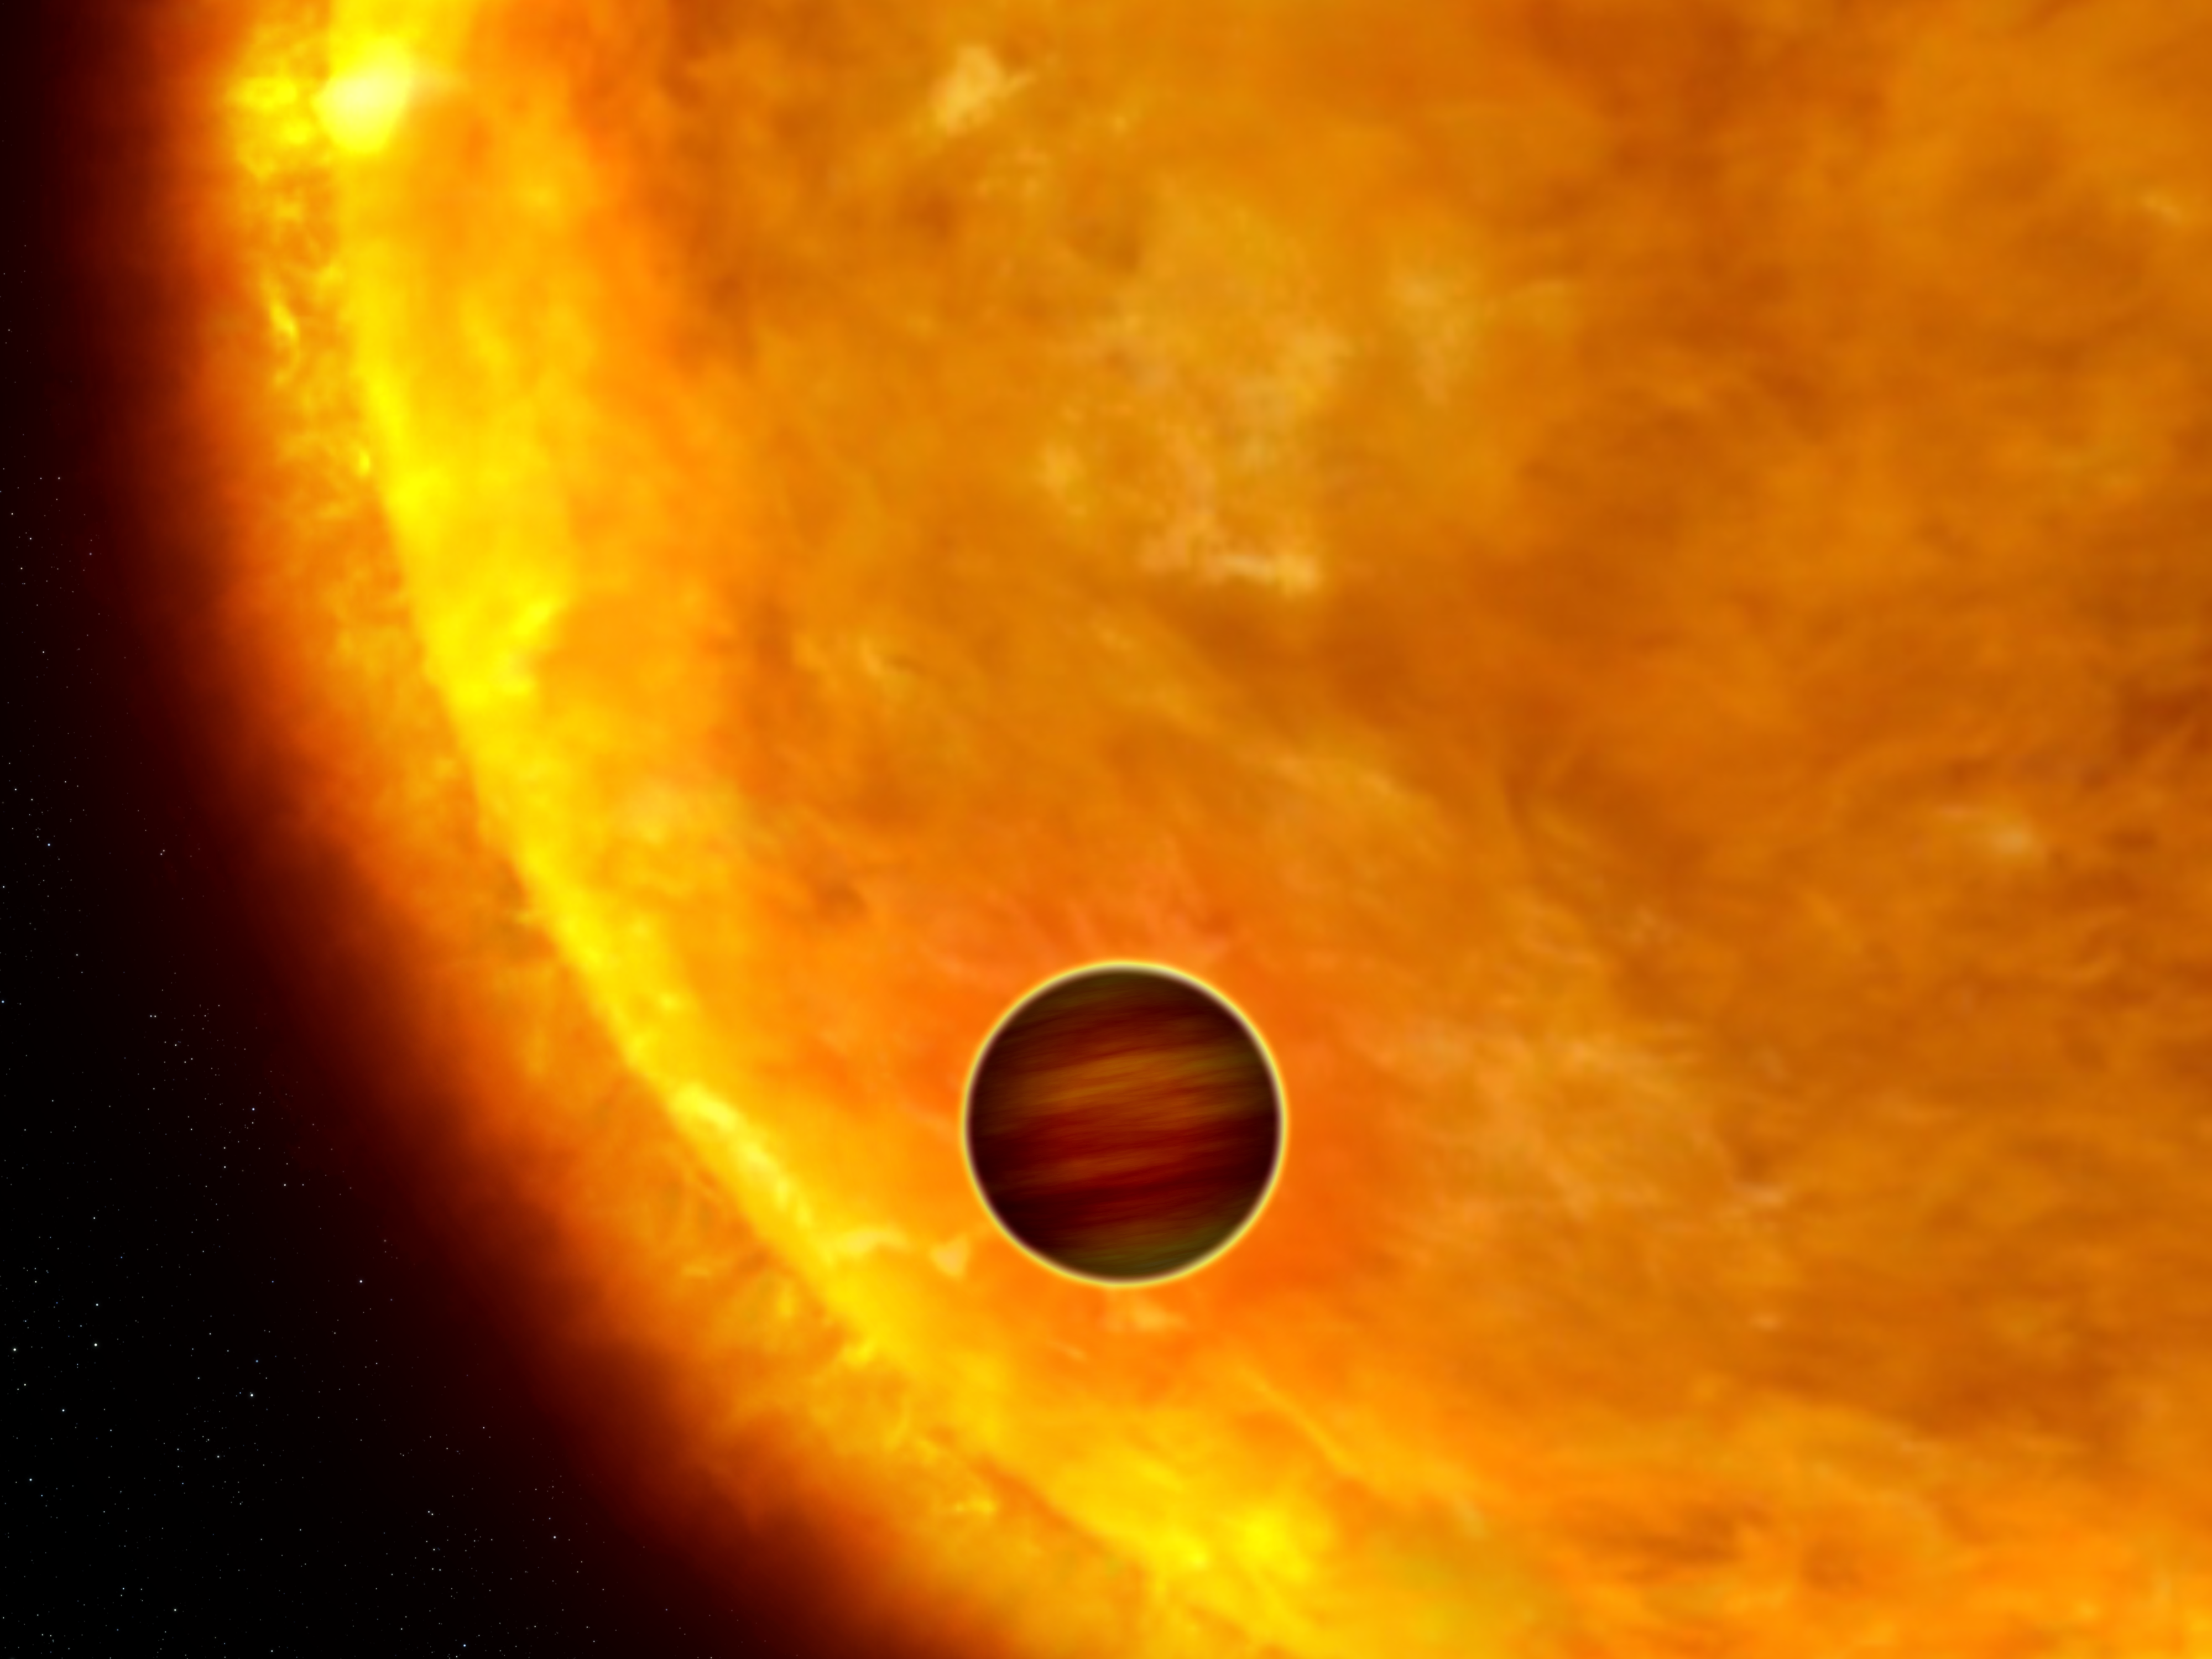

Artist's impression of a transiting extrasolar planet

This is an artist's impression of a Jupiter-sized planet passing in front of its parent star. Such events are called transits. When the planet transits the star, the star's apparent brightness drops by a few percent for a short period. Through this technique, astronomers can use the Hubble Space Telescope to search for planets across the galaxy by measuring periodic changes in a star's luminosity. The first class of extrasolar planets found by this technique are the so-called "hot Jupiters", which are so close to their stars they complete an orbit within days, or even hours.

Credit: NASA, ESA and G. Bacon